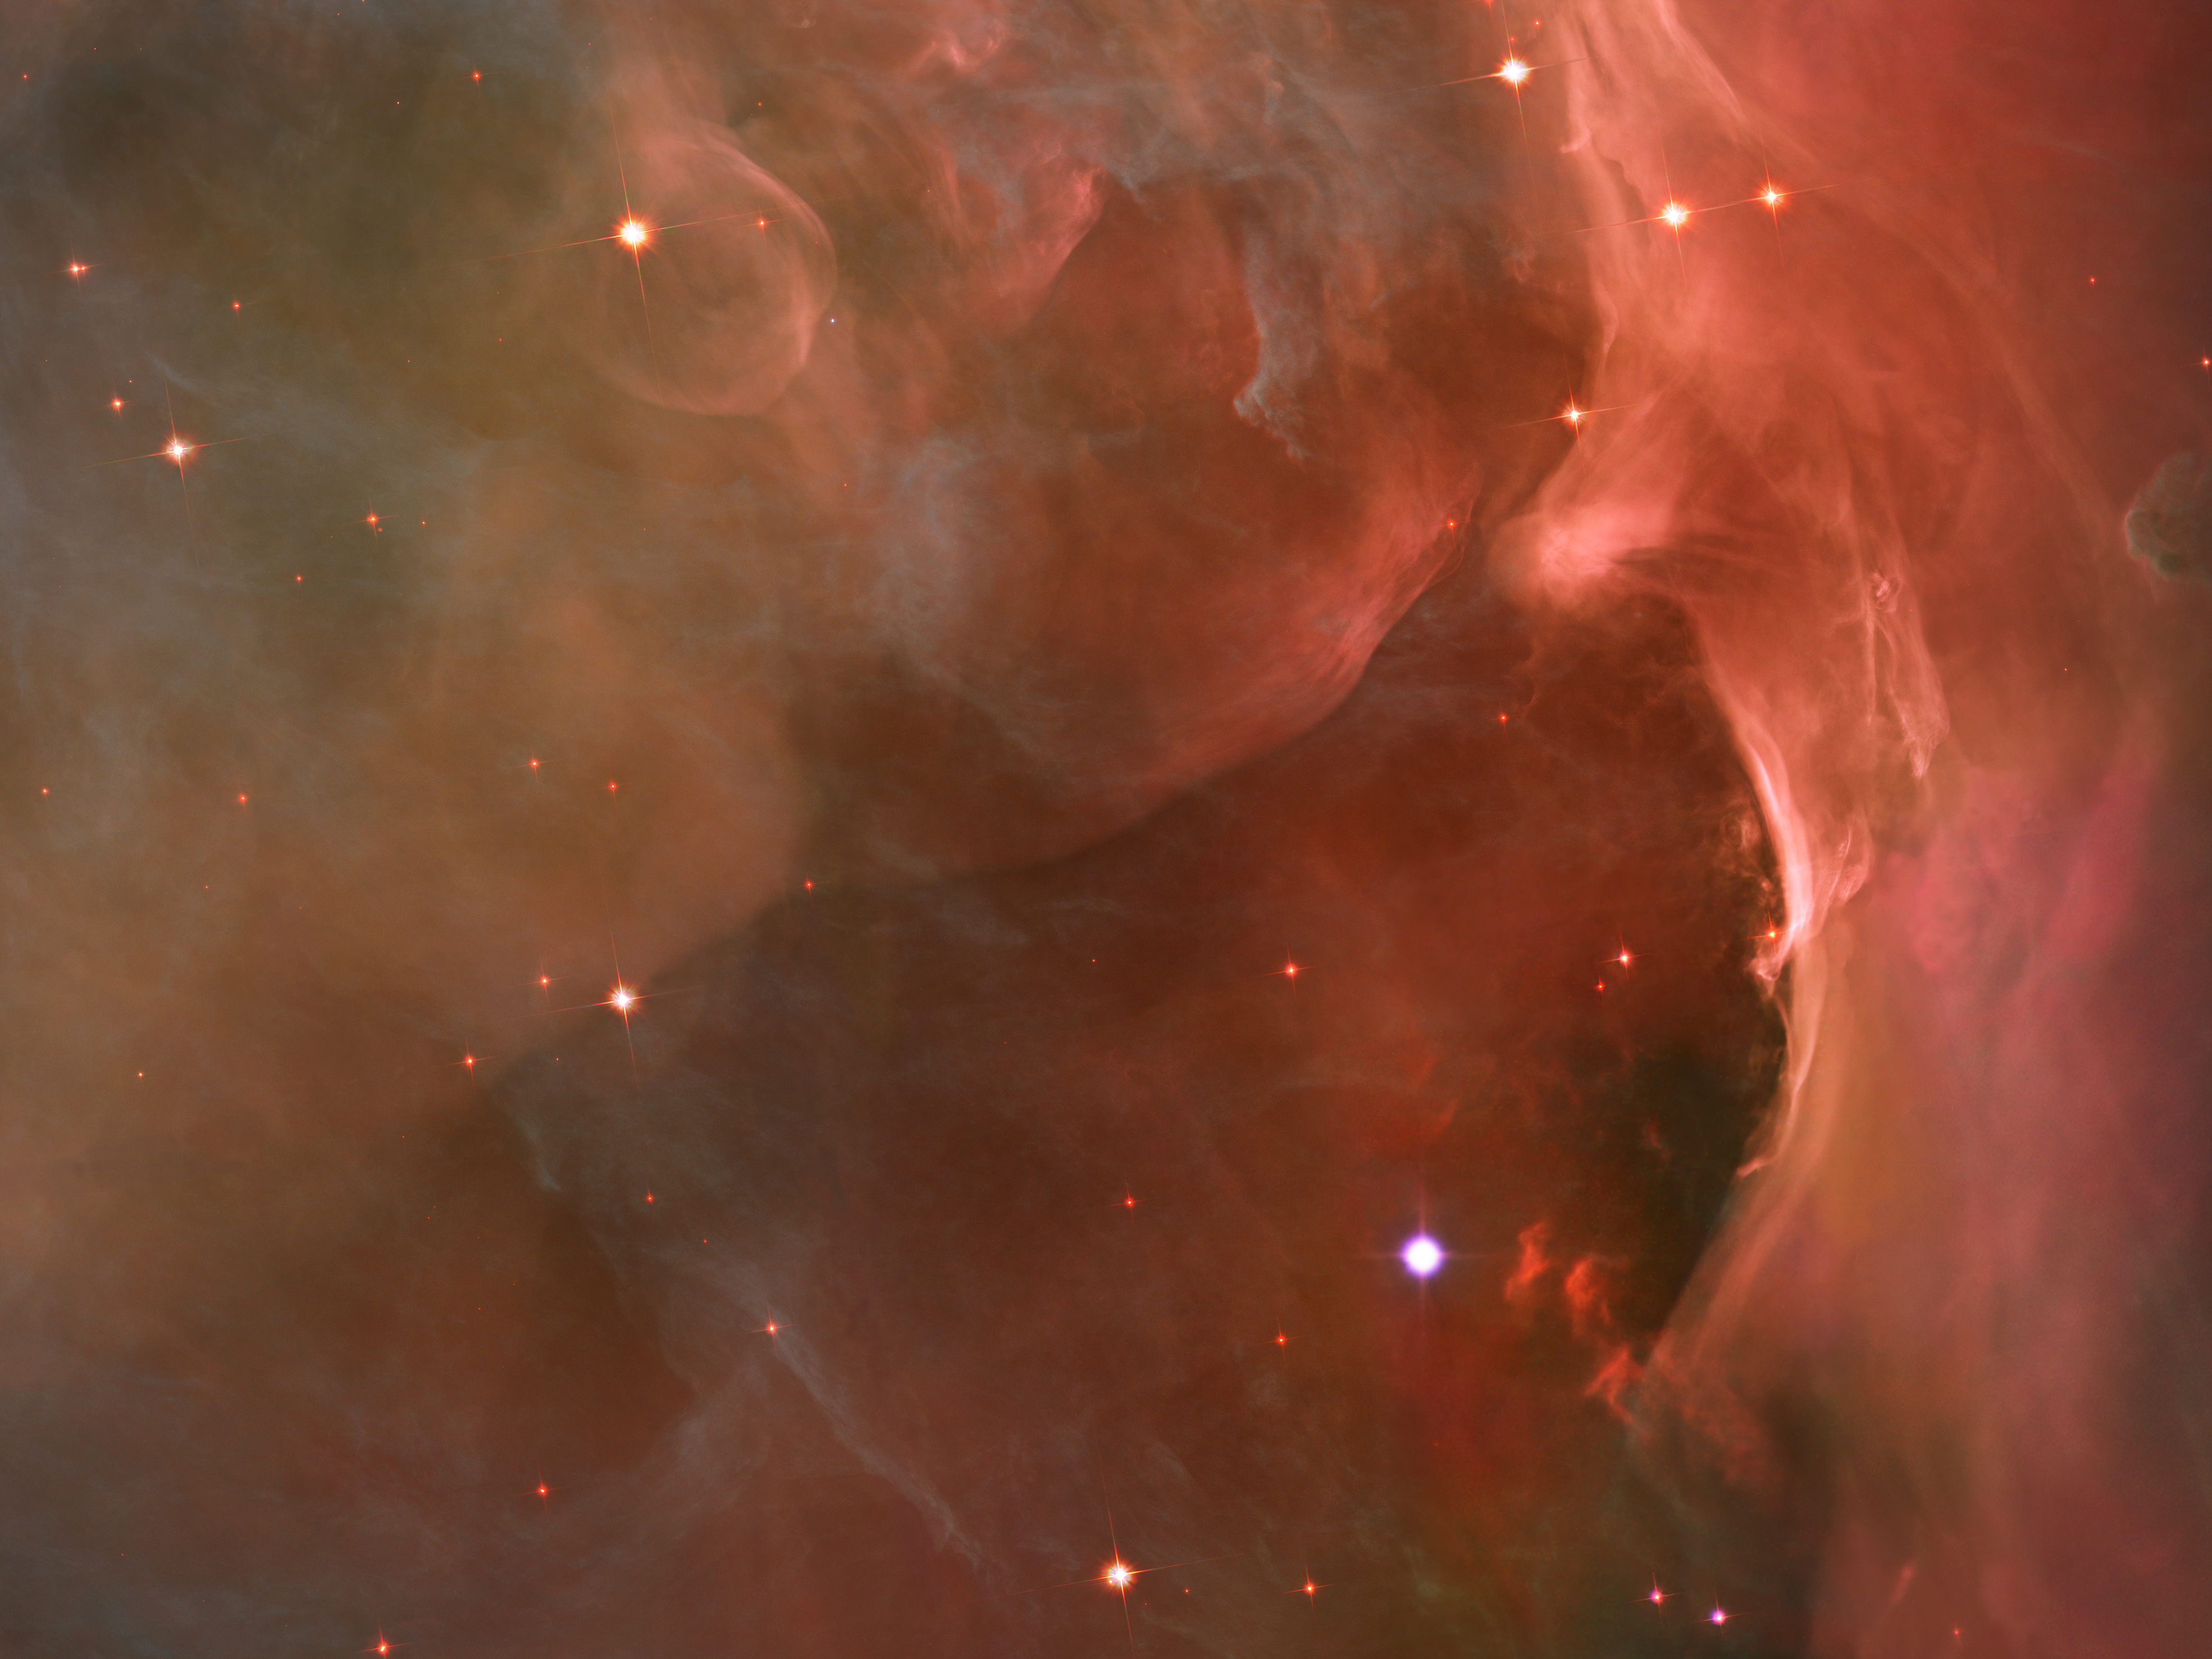

Sculpting the landscape

This glowing region reveals arcs and bubbles formed when stellar winds - streams of charged particles ejected by the Trapezium stars - collide with material.

Credit: NASA, ESA, M. Robberto ( Space Telescope Science Institute/ESA) and the Hubble Space Telescope Orion Treasury Project Team